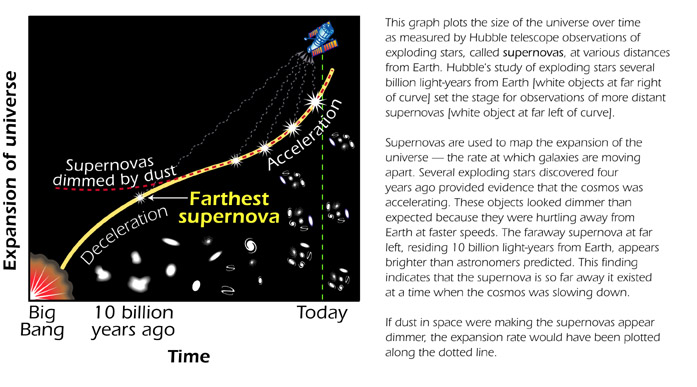

Size of the Universe over time

This graph plots the size of the universe as measured by Hubble telescope observations of exploding stars, called supernovas, at various distances from Earth.

Credit: Ann Feild (STScI)